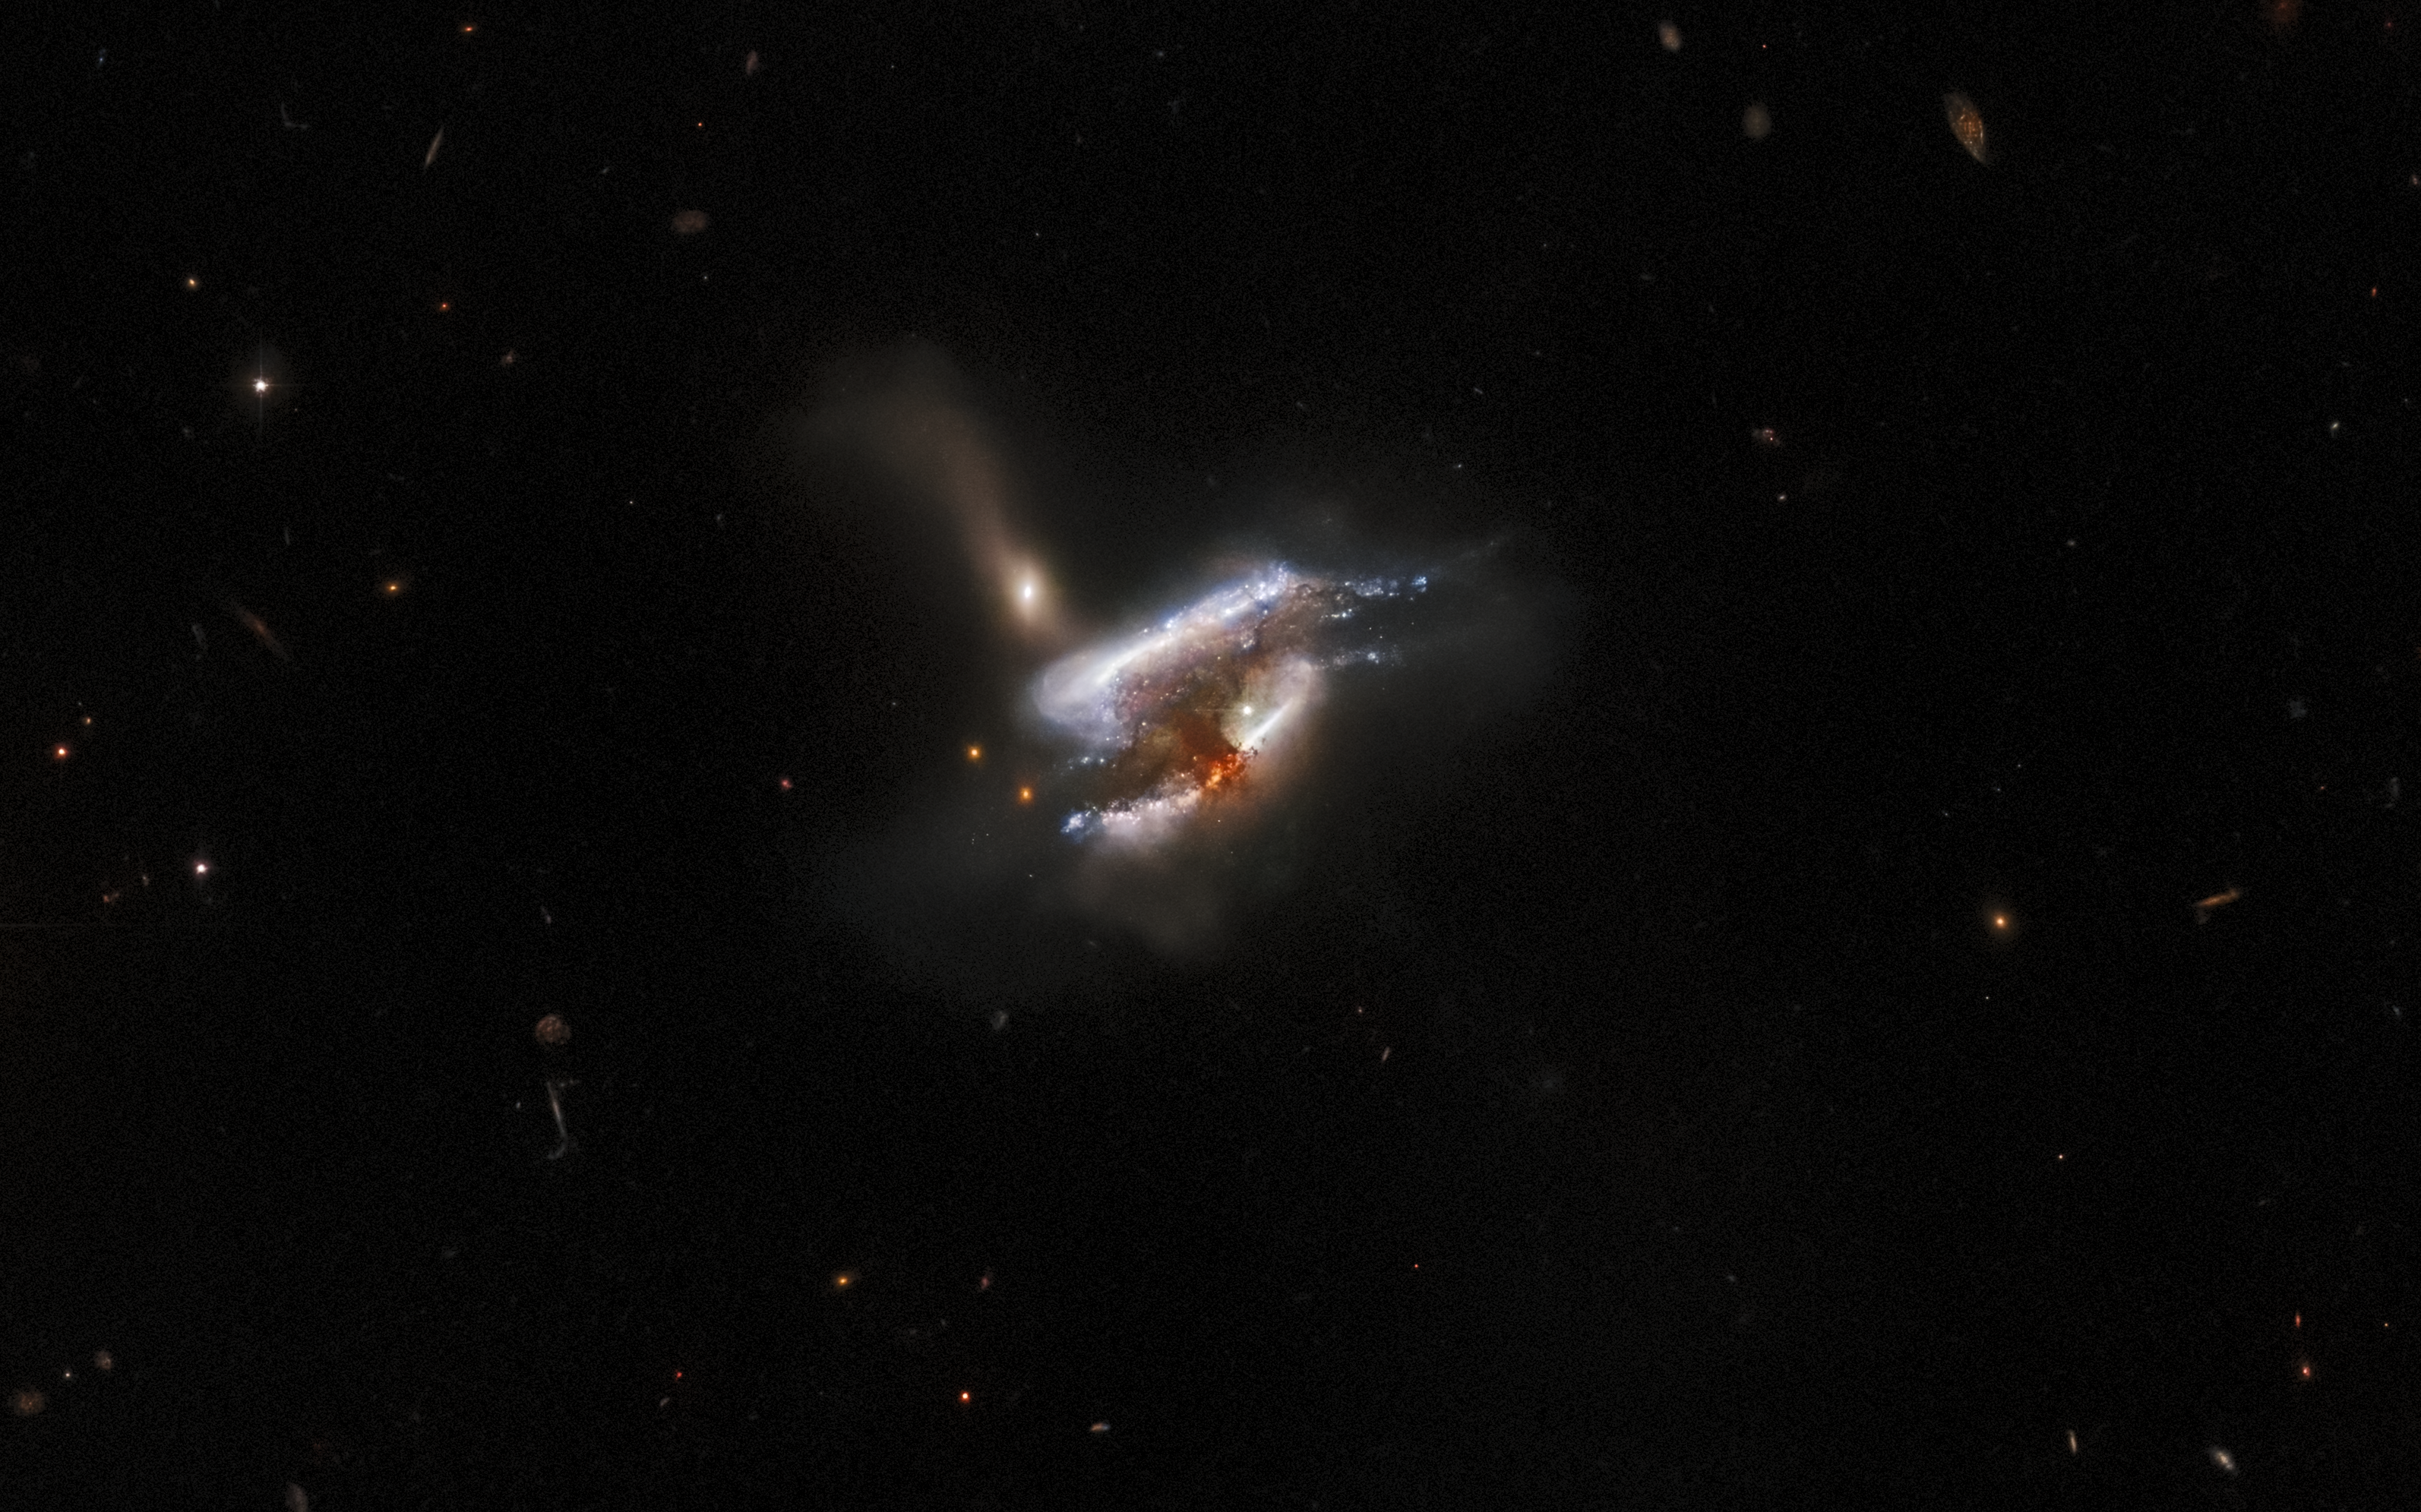

Tumultuous Galactic Trio

The mass of dust and bright swirls of stars in this image are the distant galaxy merger IC 2431, which lies 681 million light-years from Earth in the constellation Cancer. The NASA/ESA Hubble Space Telescope has captured what appears to be a triple galaxy merger in progress, as well as a tumultuous mixture of star formation and tidal distortions caused by the gravitational interactions of this galactic trio. The centre of this image is obscured by a thick cloud of dust — though light from a background galaxy can be seen piercing its outer extremities.

This image is from a series of Hubble observations investigating weird and wonderful galaxies found by the Galaxy Zoo citizen science project. Using Hubble’s powerful Advanced Camera for Surveys (ACS), astronomers took a closer look at some of the more unusual galaxies that volunteers had identified. The original Galaxy Zoo project was the largest galaxy census ever carried out, and relied on crowdsourcing time from more than 100 000 volunteers to classify 900 000 unexamined galaxies. The project achieved what would have been years of work for a professional astronomer in only 175 days, and has led to a steady stream of similar astronomical citizen science projects. Later Galaxy Zoo projects have included the largest ever studies of galaxy mergers and tidal dwarf galaxies, as well as the discovery of entirely new types of compact star-forming galaxies.

Credit: ESA/Hubble & NASA, W. Keel, Dark Energy Survey, DOE, FNAL, DECam, CTIO, NOIRLab/NSF/AURA, SDSS Acknowledgement: J. Schmidt